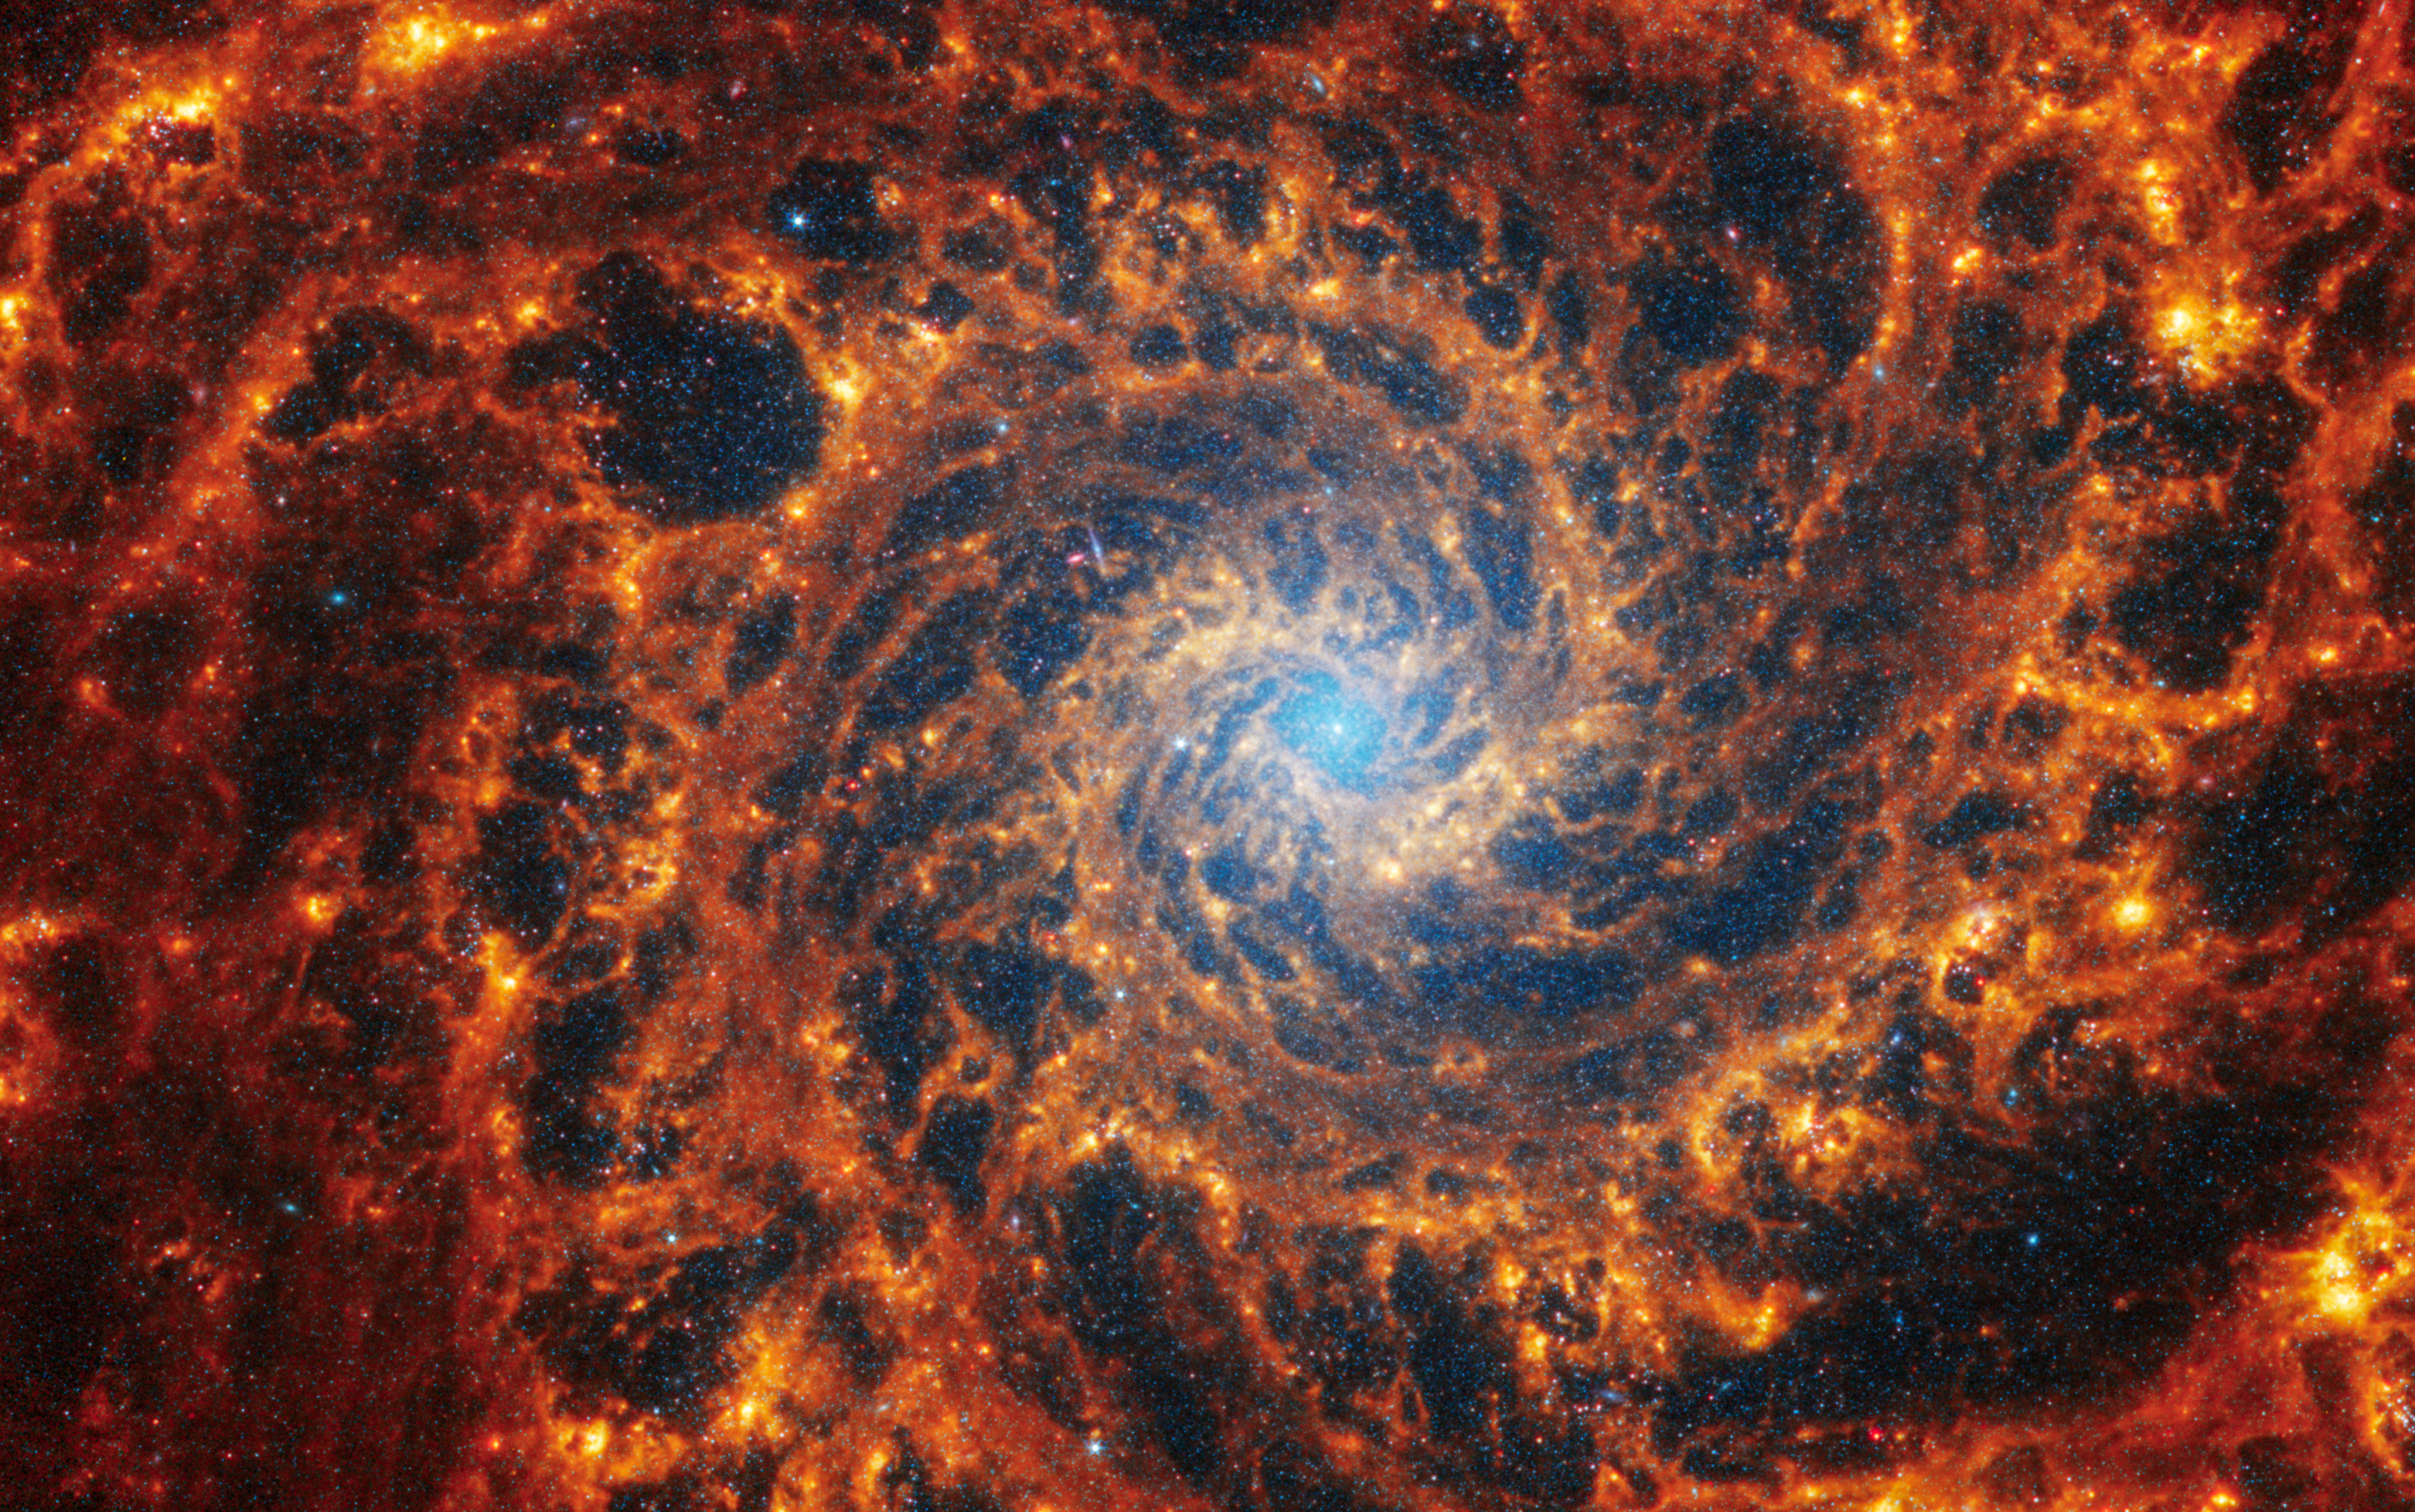

NGC 628

This spiral galaxy was observed as part of the Physics at High Angular resolution in Nearby GalaxieS (PHANGS) program, a large project that includes observations from several space- and ground-based telescopes of many galaxies to help researchers study all phases of the star formation cycle, from the formation of stars within dusty gas clouds to the energy released in the process that creates the intricate structures revealed by Webb’s new images.

NGC 628 is 32 million light-years away in the constellation Pisces.

Learn more about what can be seen in this vast collection of Webb images here.

Credit: NASA, ESA, CSA, STScI, J. Lee (STScI), T. Williams (Oxford), PHANGS Team